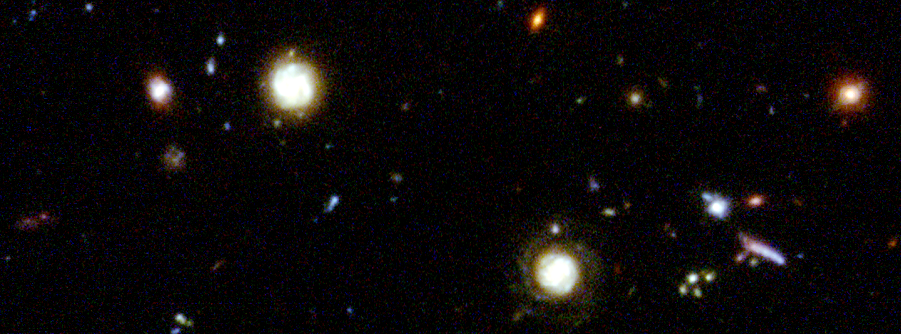

Hubble Deep Field details

Representing a narrow 'keyhole' view stretching all the way to the visible horizon of the universe, the HDF image covers a speck of sky a tiny fraction the diameter of the full Moon. This is so narrow, just a few foreground stars in our Milky Way Galaxy are visible and are vastly outnumbered by the menagerie of far more distant galaxies.

Credit: Robert Williams and the Hubble Deep Field Team (STScI) and NASA/ESA